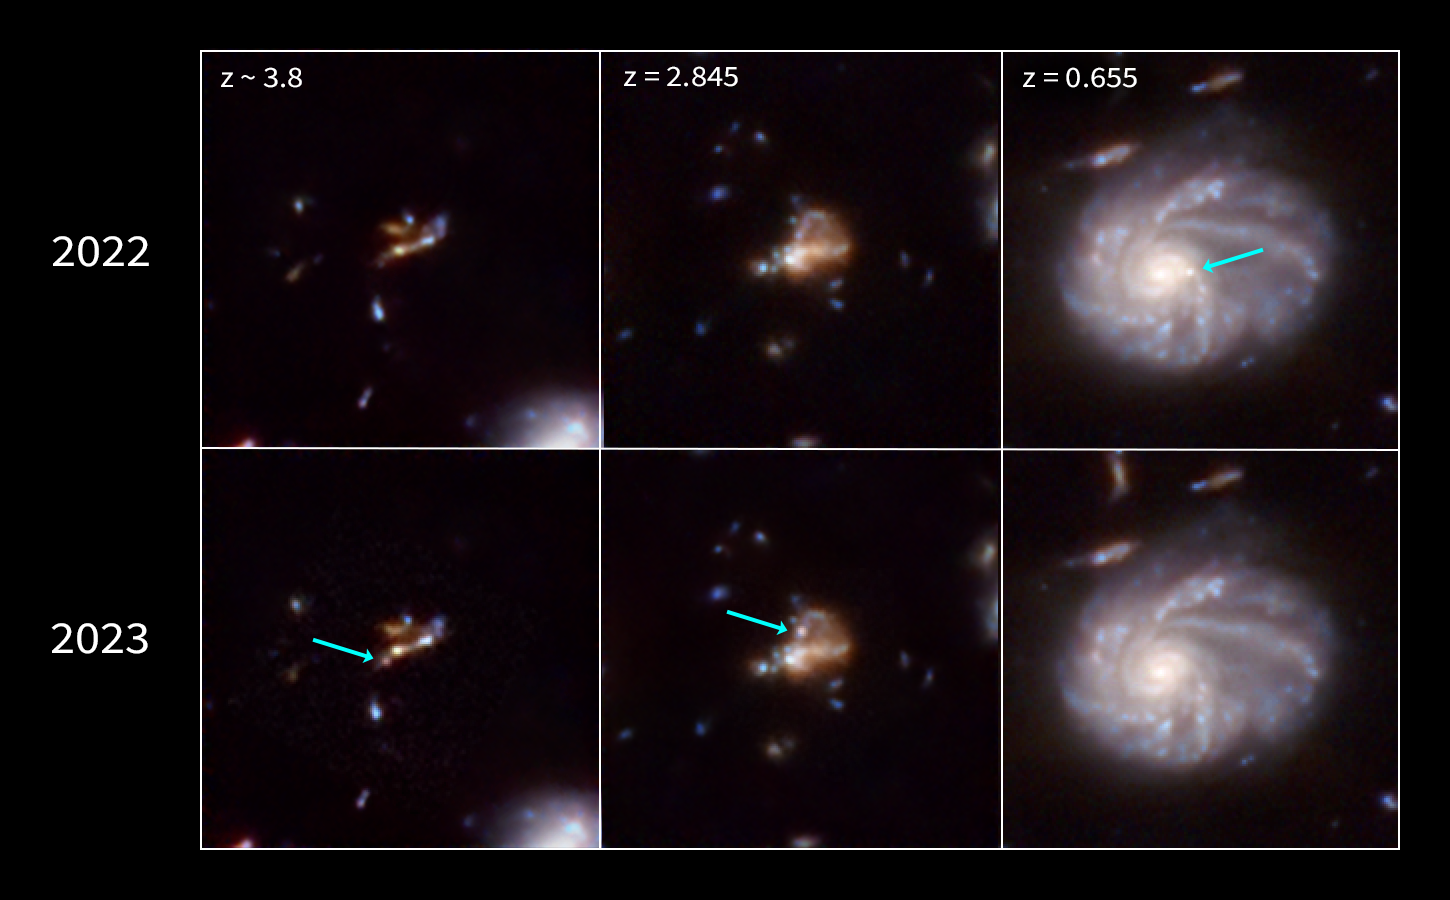

Three JADES galaxies with supernovae (2023 vs. 2022)

The NASA/ESA/CSA James Webb Space Telescope is giving scientists their first detailed glimpse of supernovae from a time when our Universe was just a small fraction of its current age. A team using Webb data has identified 10 times more supernovae in the early Universe than were previously known. A few of the newfound exploding stars are the most distant examples of their type, including those used to measure the universe’s expansion rate.

To make these discoveries, the team analyzed imaging data obtained as part of the JWST Advanced Deep Extragalactic Survey (JADES) program. Webb is ideal for finding extremely distant supernovae because their light is stretched into longer wavelengths — a phenomenon known as cosmological redshift.

Prior to Webb’s launch, only a handful of supernovae had been found above a redshift of 2, which corresponds to when the universe was only 3.3 billion years old — just 25% of its current age. The JADES sample contains many supernovae that exploded even further in the past, when the universe was less than 2 billion years old. Previously, researchers used the NASA/ESA Hubble Space Telescope to view supernovae from when the universe was in the “young adult” stage. With JADES, scientists are seeing supernovae when the universe was in its “teens” or “pre-teens.” In the future, they hope to look back to the “toddler” or “infant” phase of the universe.

To discover the supernovae, the team compared multiple images taken up to one year apart and looked for sources that disappeared or appeared in those images. These objects that vary in observed brightness over time are called transients, and supernovae are a type of transient. In all, the JADES Transient Survey Sample team uncovered 79 supernovae in a patch of sky only about the thickness of a grain of rice held at arm’s length.

The team identified a number of high-redshift supernovae, including the farthest one ever spectroscopically confirmed, at a redshift of 3.6. Its progenitor star exploded when the universe was only 1.8 billion years old. It is a so-called core-collapse supernova, an explosion of a massive star.

These findings were presented in a press conference at the 244th meeting of the American Astronomical Society in Madison, Wisconsin. Learn more about these results here.

Credit: NASA, ESA, CSA, STScI